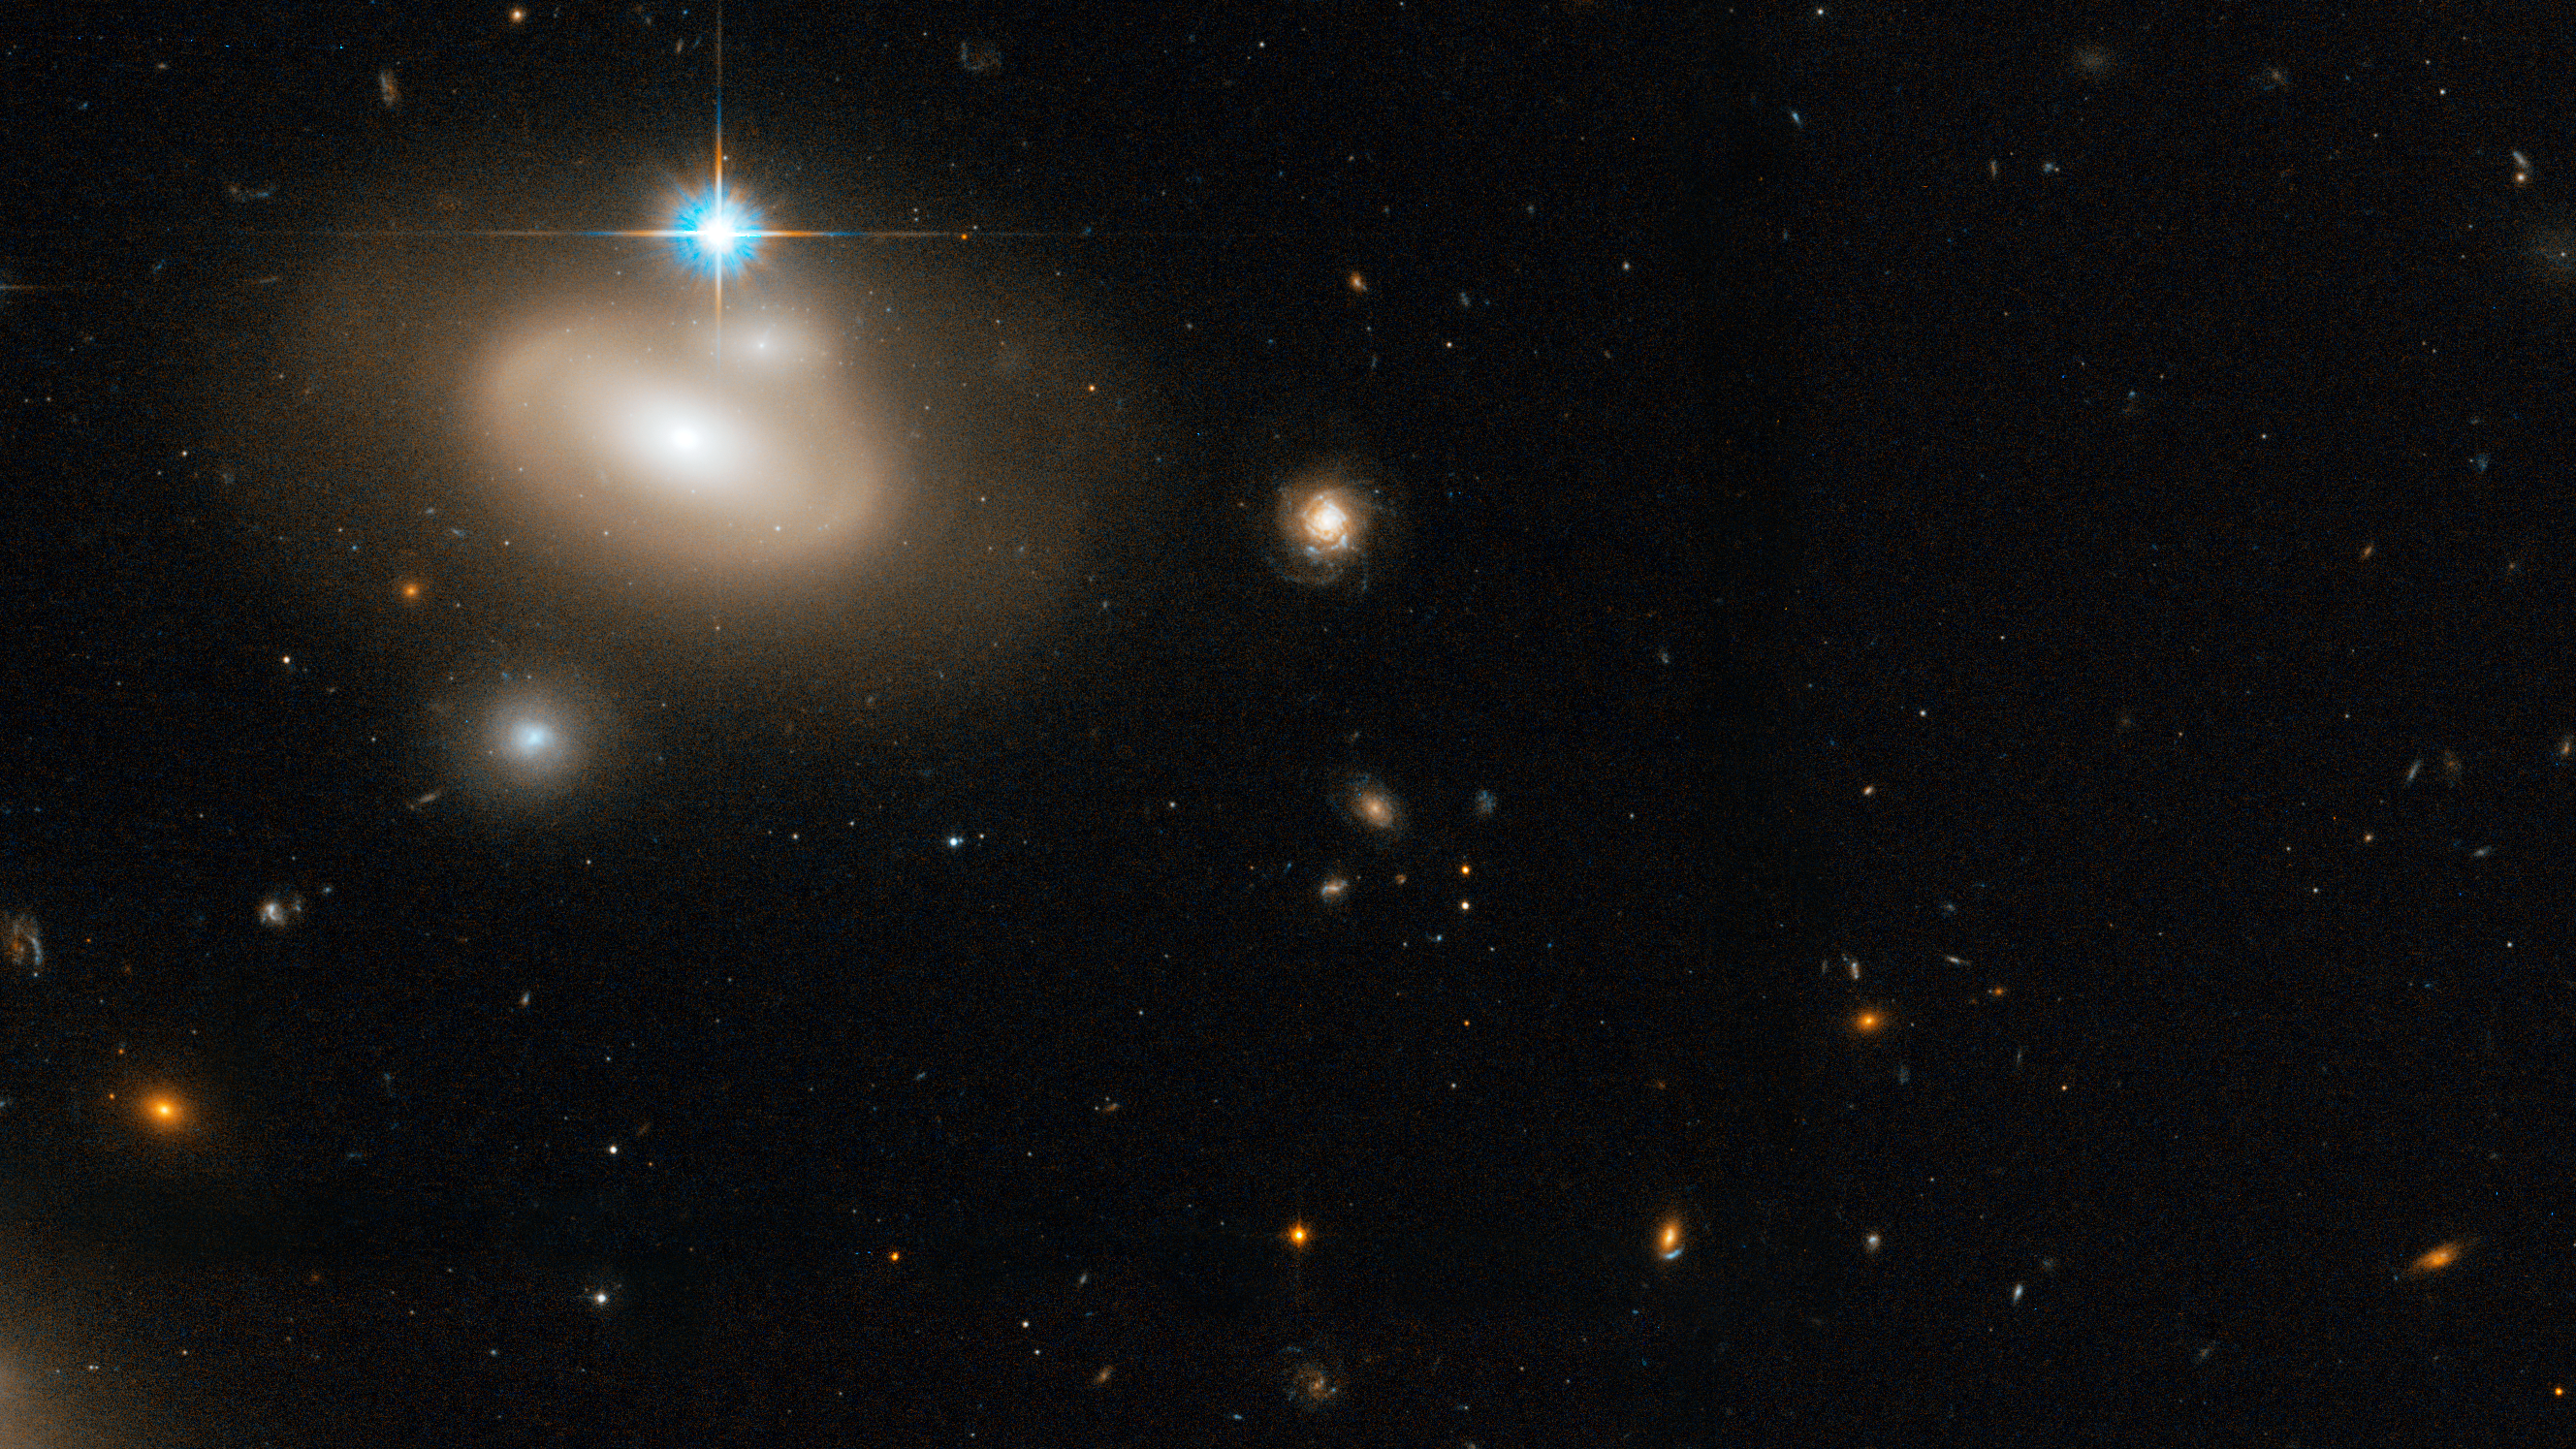

Coma Galaxy Cluster (Detail 3)

Lenticular galaxy in the Coma Cluster with numerous background galaxies.

Credit: NASA, ESA, and the Hubble Heritage Team (STScI/AURA). Acknowledgment: D. Carter (Liverpool John Moores University) and the Coma HST ACS Treasury Team.